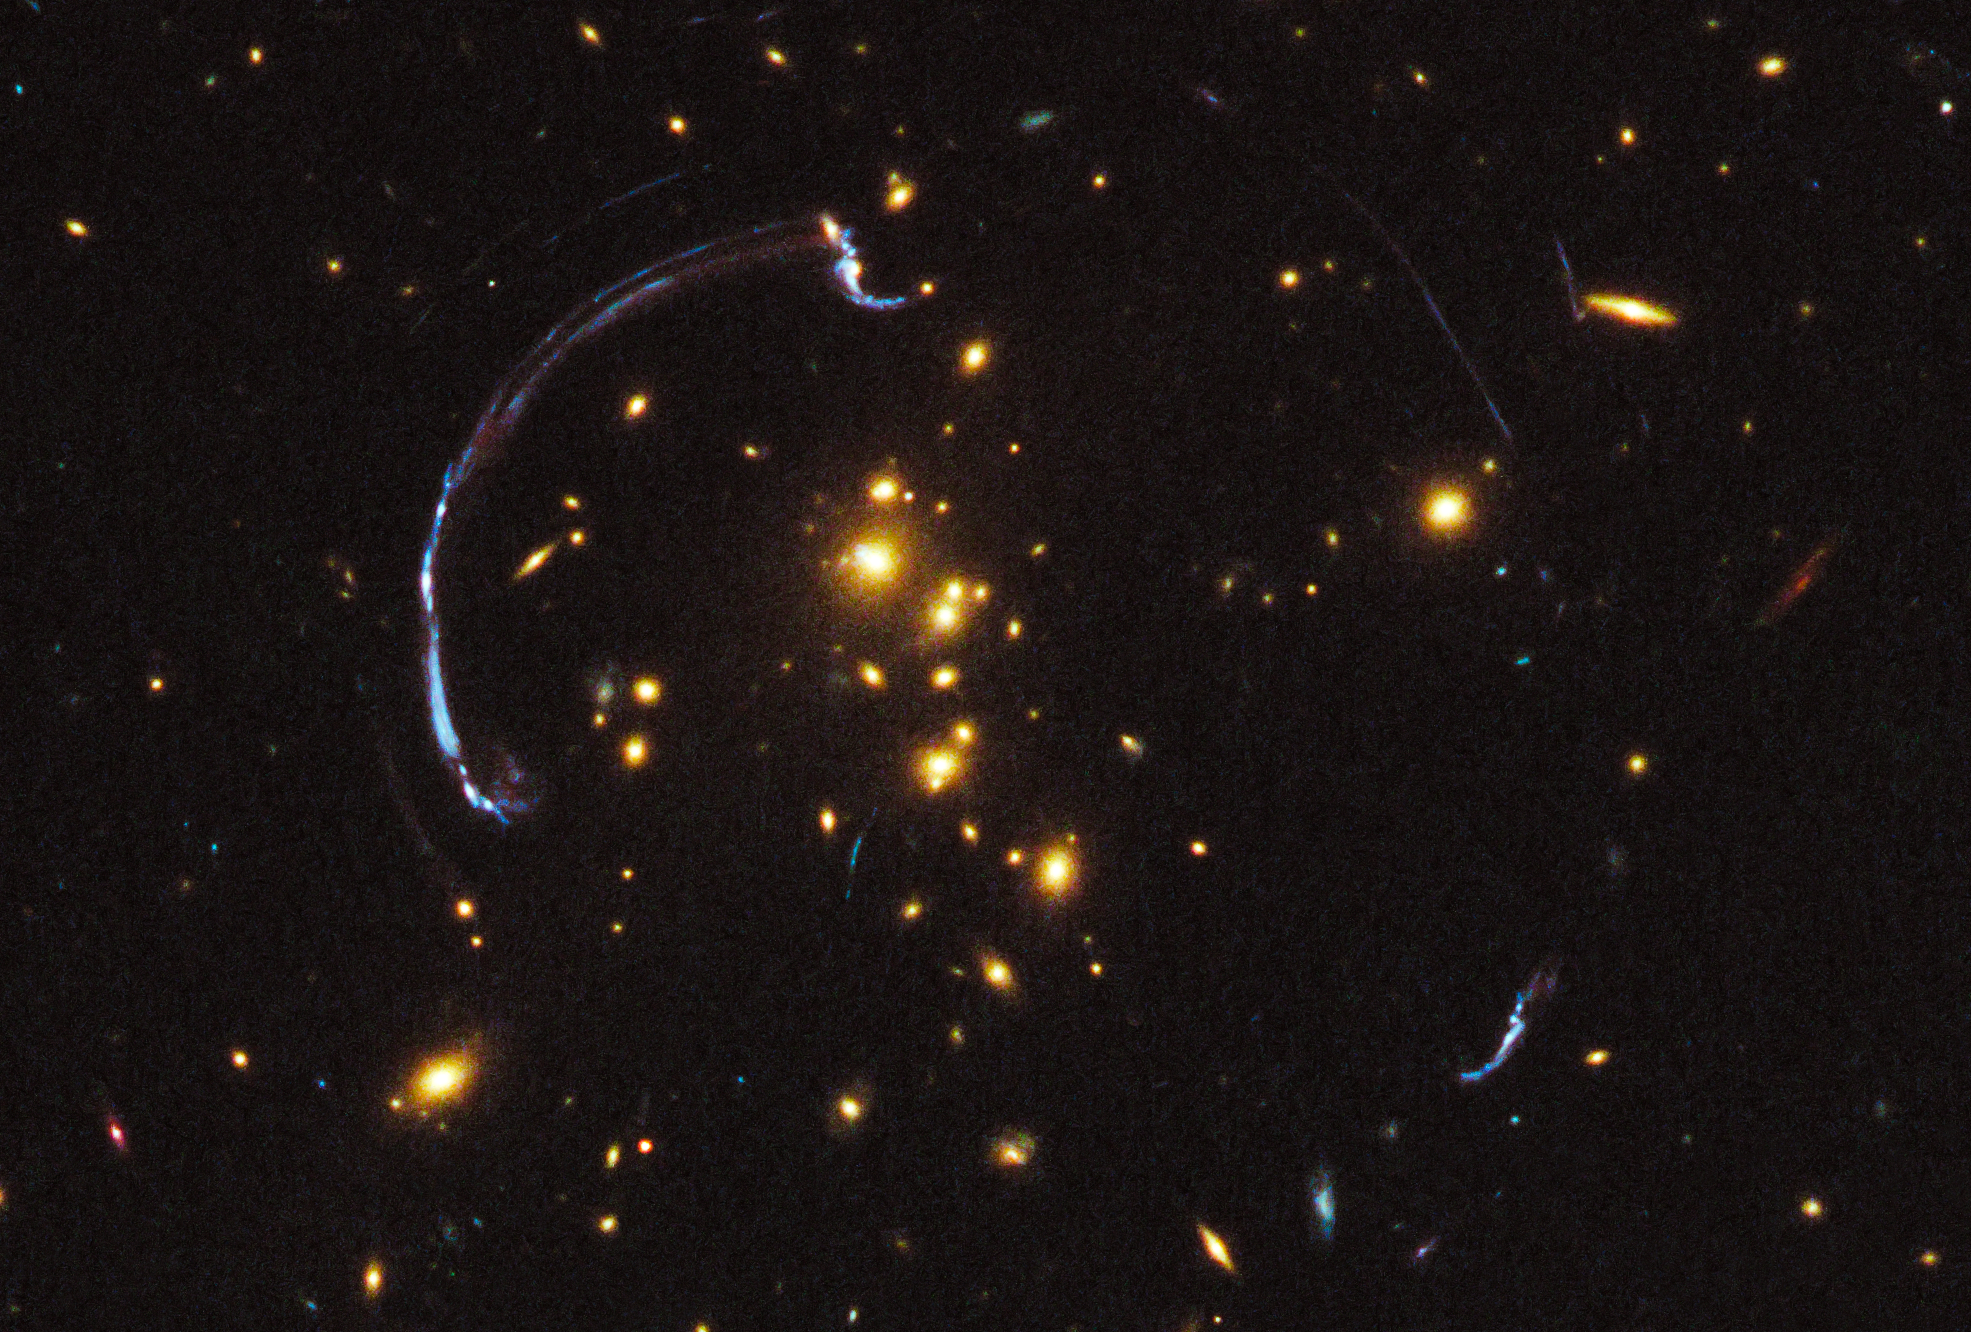

Hubble sees giant lensed galaxy arc

Thanks to the presence of a natural "zoom lens" in space, this is a close-up look at the brightest distant "magnified" galaxy in the Universe known to date. It is one of the most striking examples of gravitational lensing, where the gravitational field of a foreground galaxy bends and amplifies the light of a more distant background galaxy. In this image the light from a distant galaxy, nearly 10 billion light-years away, has been warped into a nearly 90-degree arc of light in the galaxy cluster RCS2 032727-132623. The galaxy cluster lies 5 billion light-years away. The background galaxy's image is over three times brighter than typically lensed galaxies. The natural-colour image was taken in March 2011 with the Hubble Space Telescope's Wide Field Camera 3.

Credit: NASA, ESA, J. Rigby (NASA Goddard Space Flight Center), K. Sharon (Kavli Institute for Cosmological Physics, University of Chicago), and M. Gladders and E. Wuyts (University of Chicago)